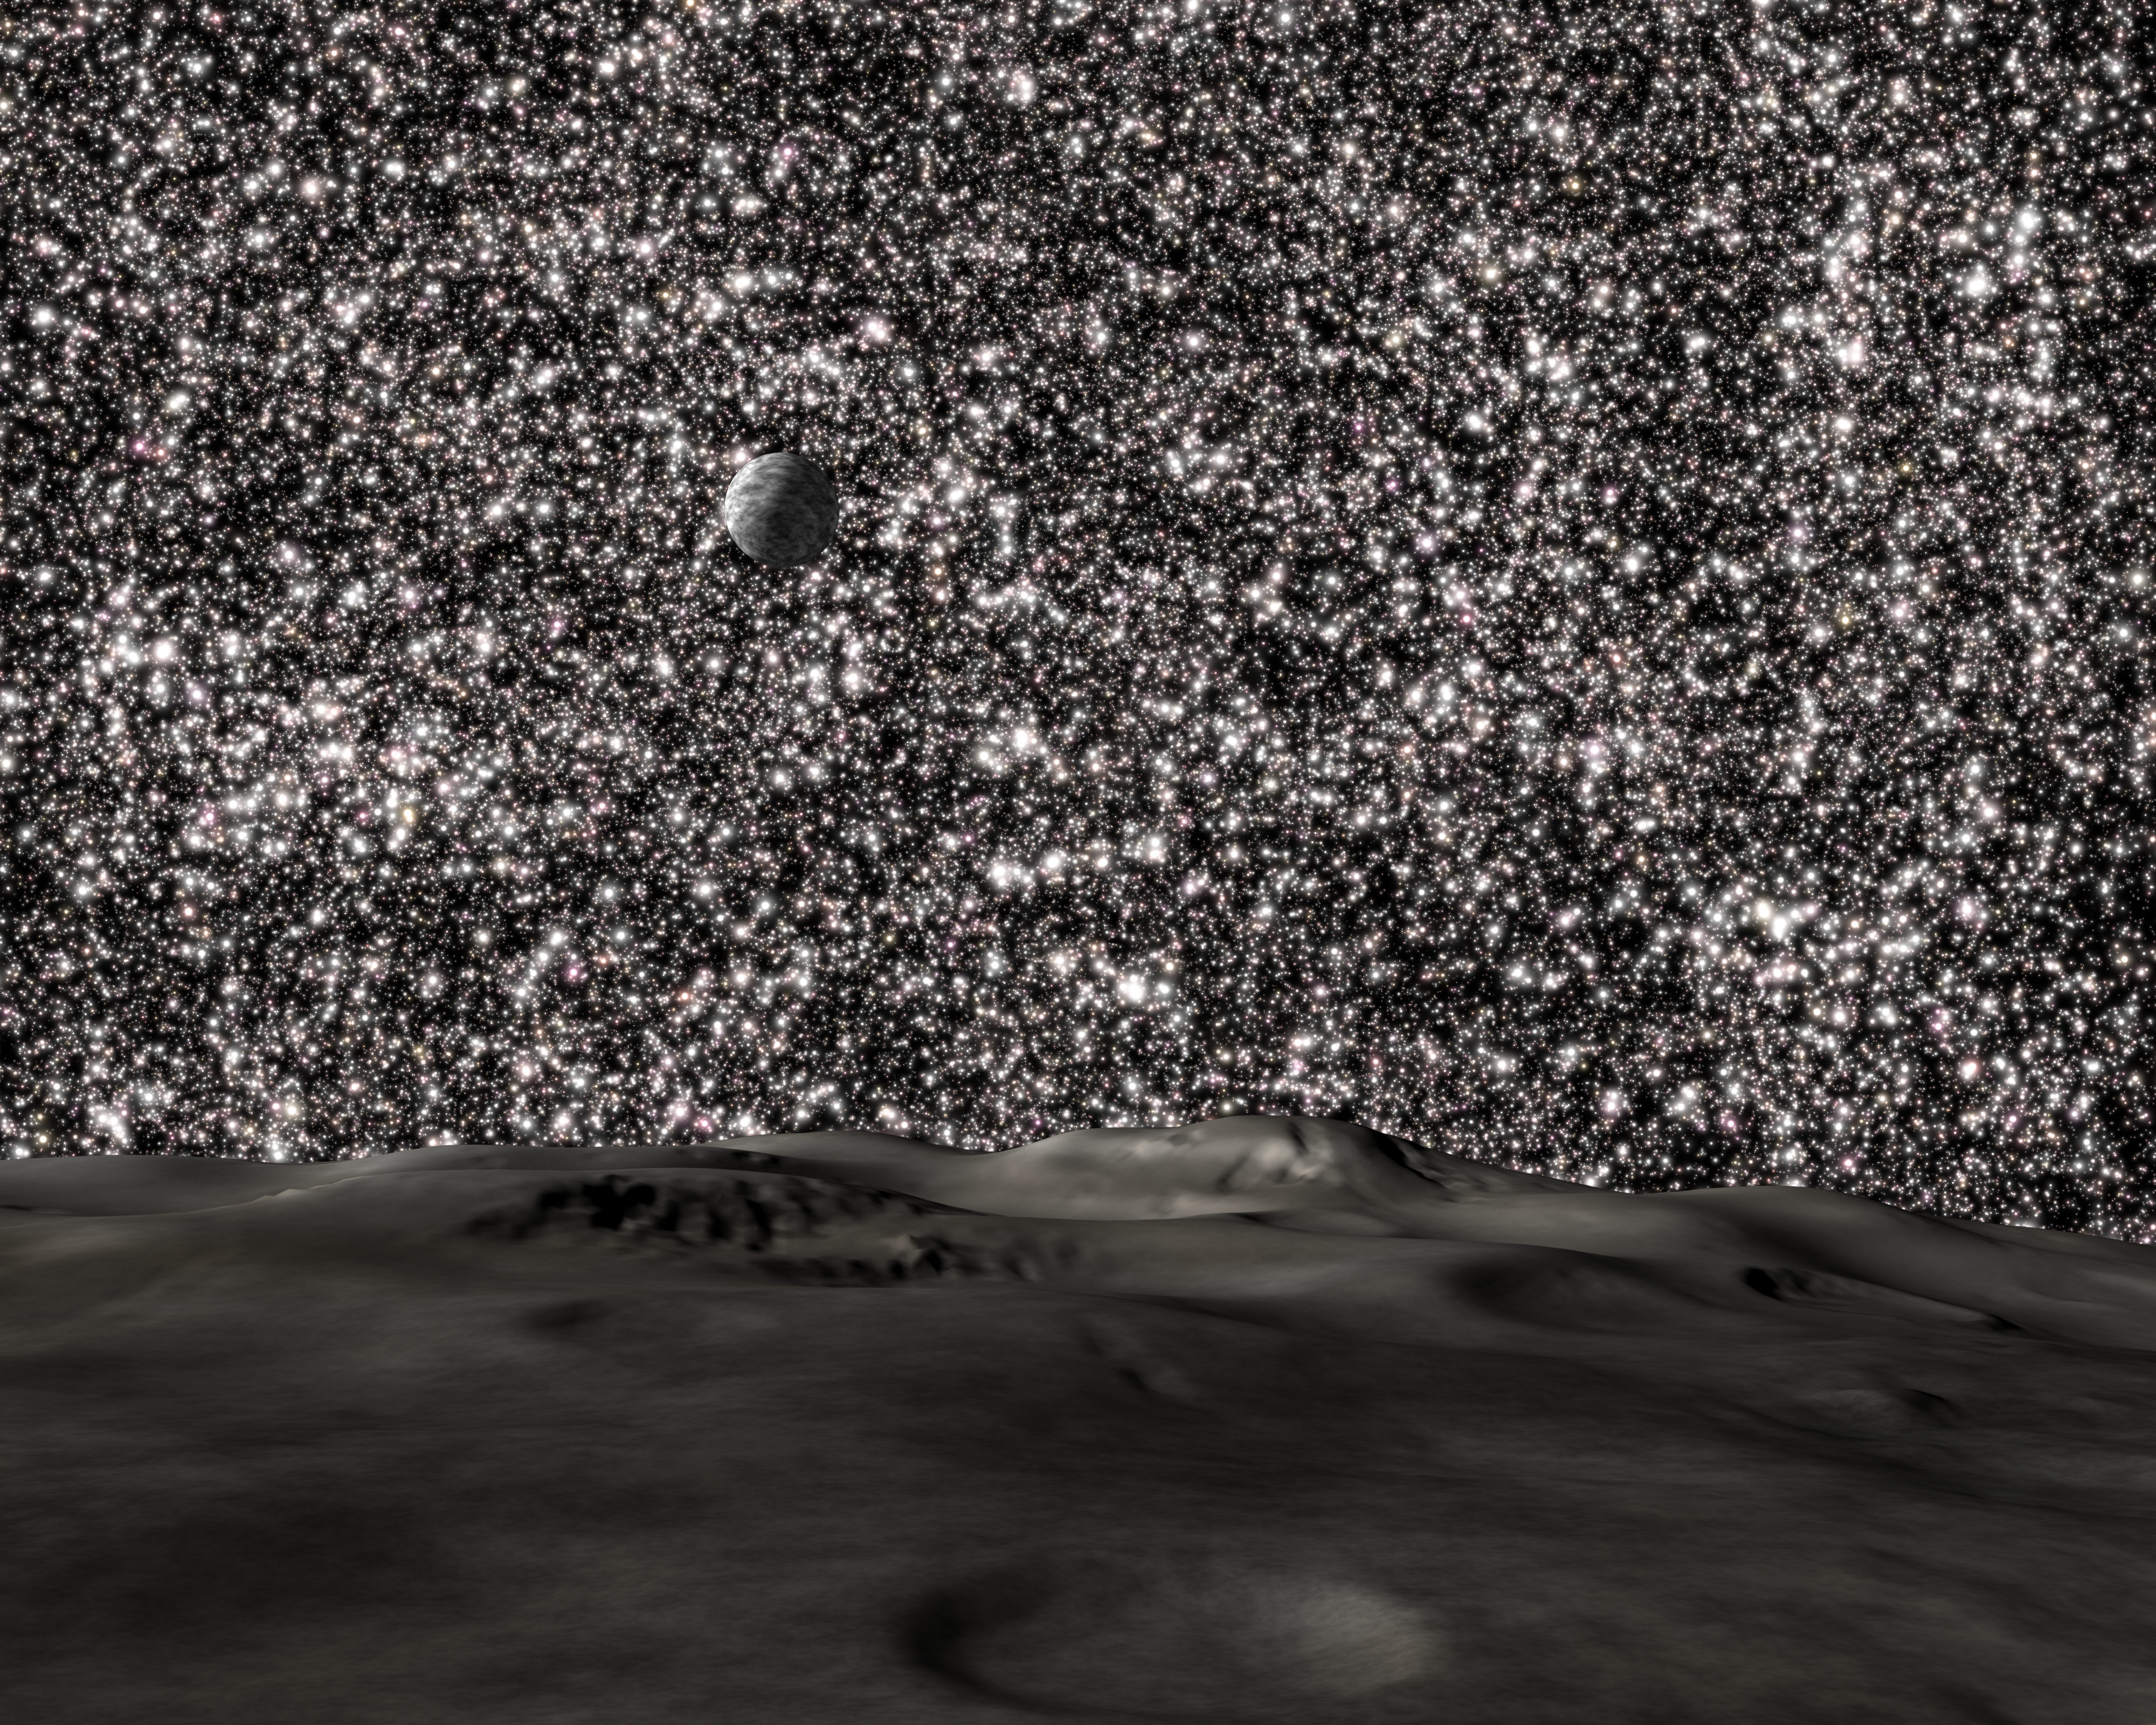

Starry, Starry Night

This illustration from a hypothetical planet in a distant ultra-dense galaxy reveals a sky packed with thousands of stars. There are 200 times more stars in this sky than in our Earth's night-time sky. The ultra-dense galaxies existed about 11 billion years ago. They are a fraction of the size of today's galaxies but contain the same number of stars.

Credit: NASA, ESA and G. Bacon (STScI)